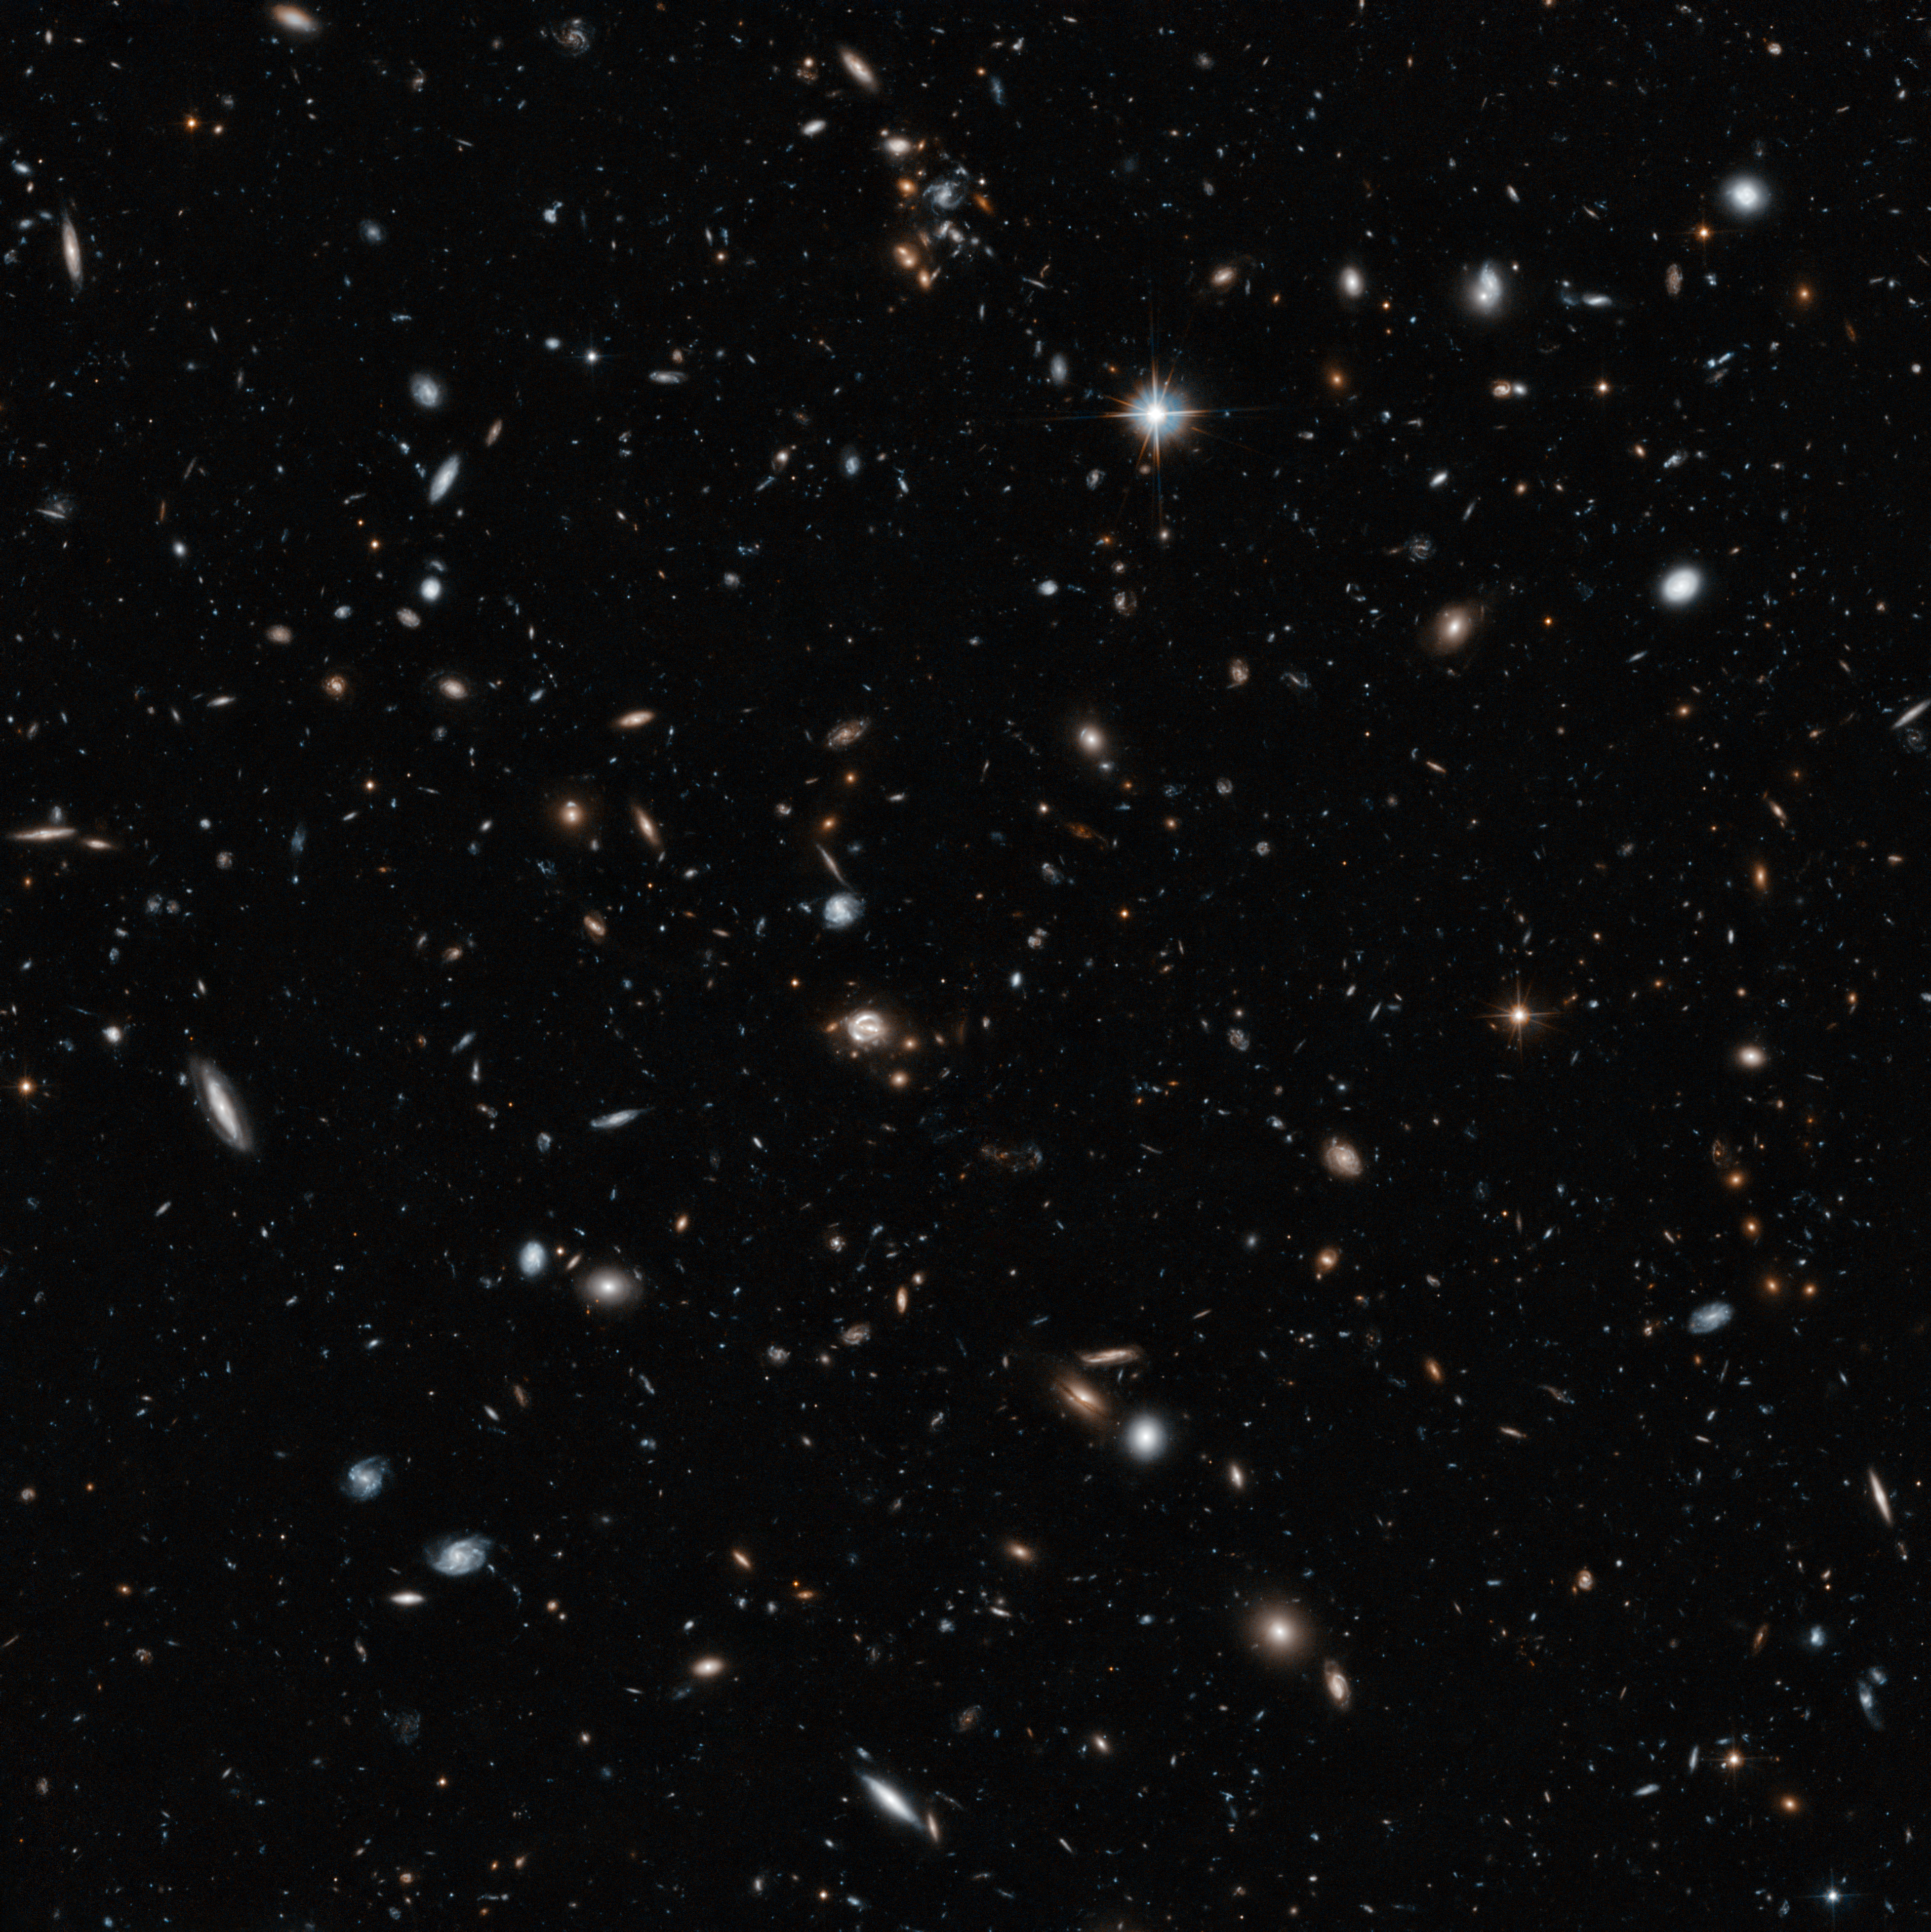

Hubble’s cross-section of the cosmos

Hubble’s images might look flat, but this one shows a remarkable depth of field that lets us see more than halfway to the edge of the observable Universe. Most of the galaxies visible here are members of a huge cluster called CLASS B1608+656, which lies about five billion light-years away. But the field also contains other objects, both significantly closer and far more distant, including quasar QSO-160913+653228 which is so distant its light has taken nine billion years to reach us, two thirds of the time that has elapsed since the Big Bang.

Credit: NASA, ESA